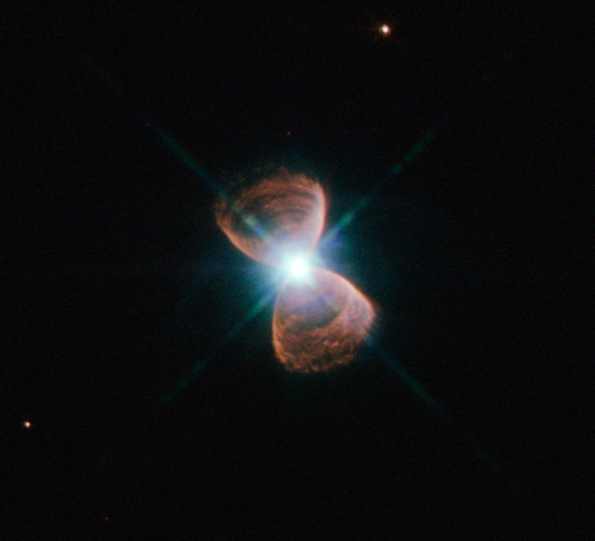

Bipolar planetary nebula PN Hb 12

This image shows an example of a bipolar planetary nebula known as PN Hb 12 — popularly known as Hubble 12 — in the constellation of Cassiopeia. The striking shape of this nebula, reminiscent of a butterfly or an hourglass, was formed as a Sun-like star approached the end of its life and puffed its outer layers into the surrounding space. For bipolar nebulae, this material is funnelled towards the poles of the ageing star, creating the distinctive double-lobed structure.

Observations using the NASA/ESA Hubble Space Telescope and the NTT have found that bipolar planetary nebulae located towards the central bulge of our Milky Way appear to be strangely aligned in the sky — a surprising result given their varied and chaotic formation.

PN Hb 12 was not part of the new study. A version of this image was entered into the Hubble's Hidden Treasures image processing competition by contestant Josh Barrington.

Credit: NASA, ESA Acknowledgement: Josh Barrington